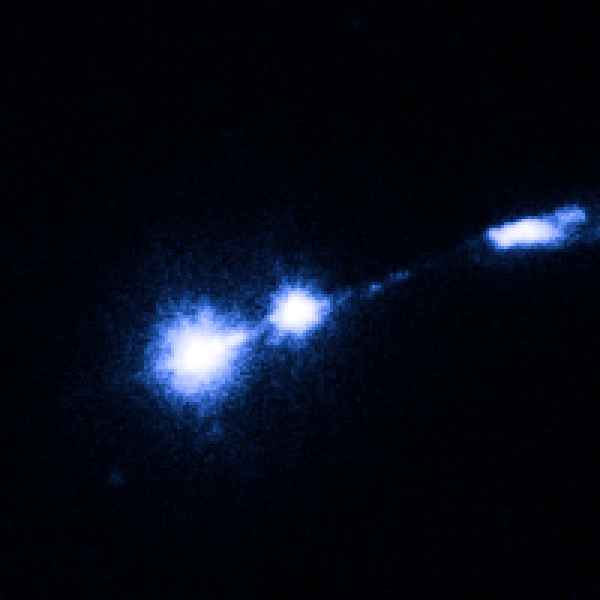

M87 nucleus and bright knot

Image taken on 27 February 2002.

Credit: NASA, ESA and J. Madrid (McMaster University, Canada)